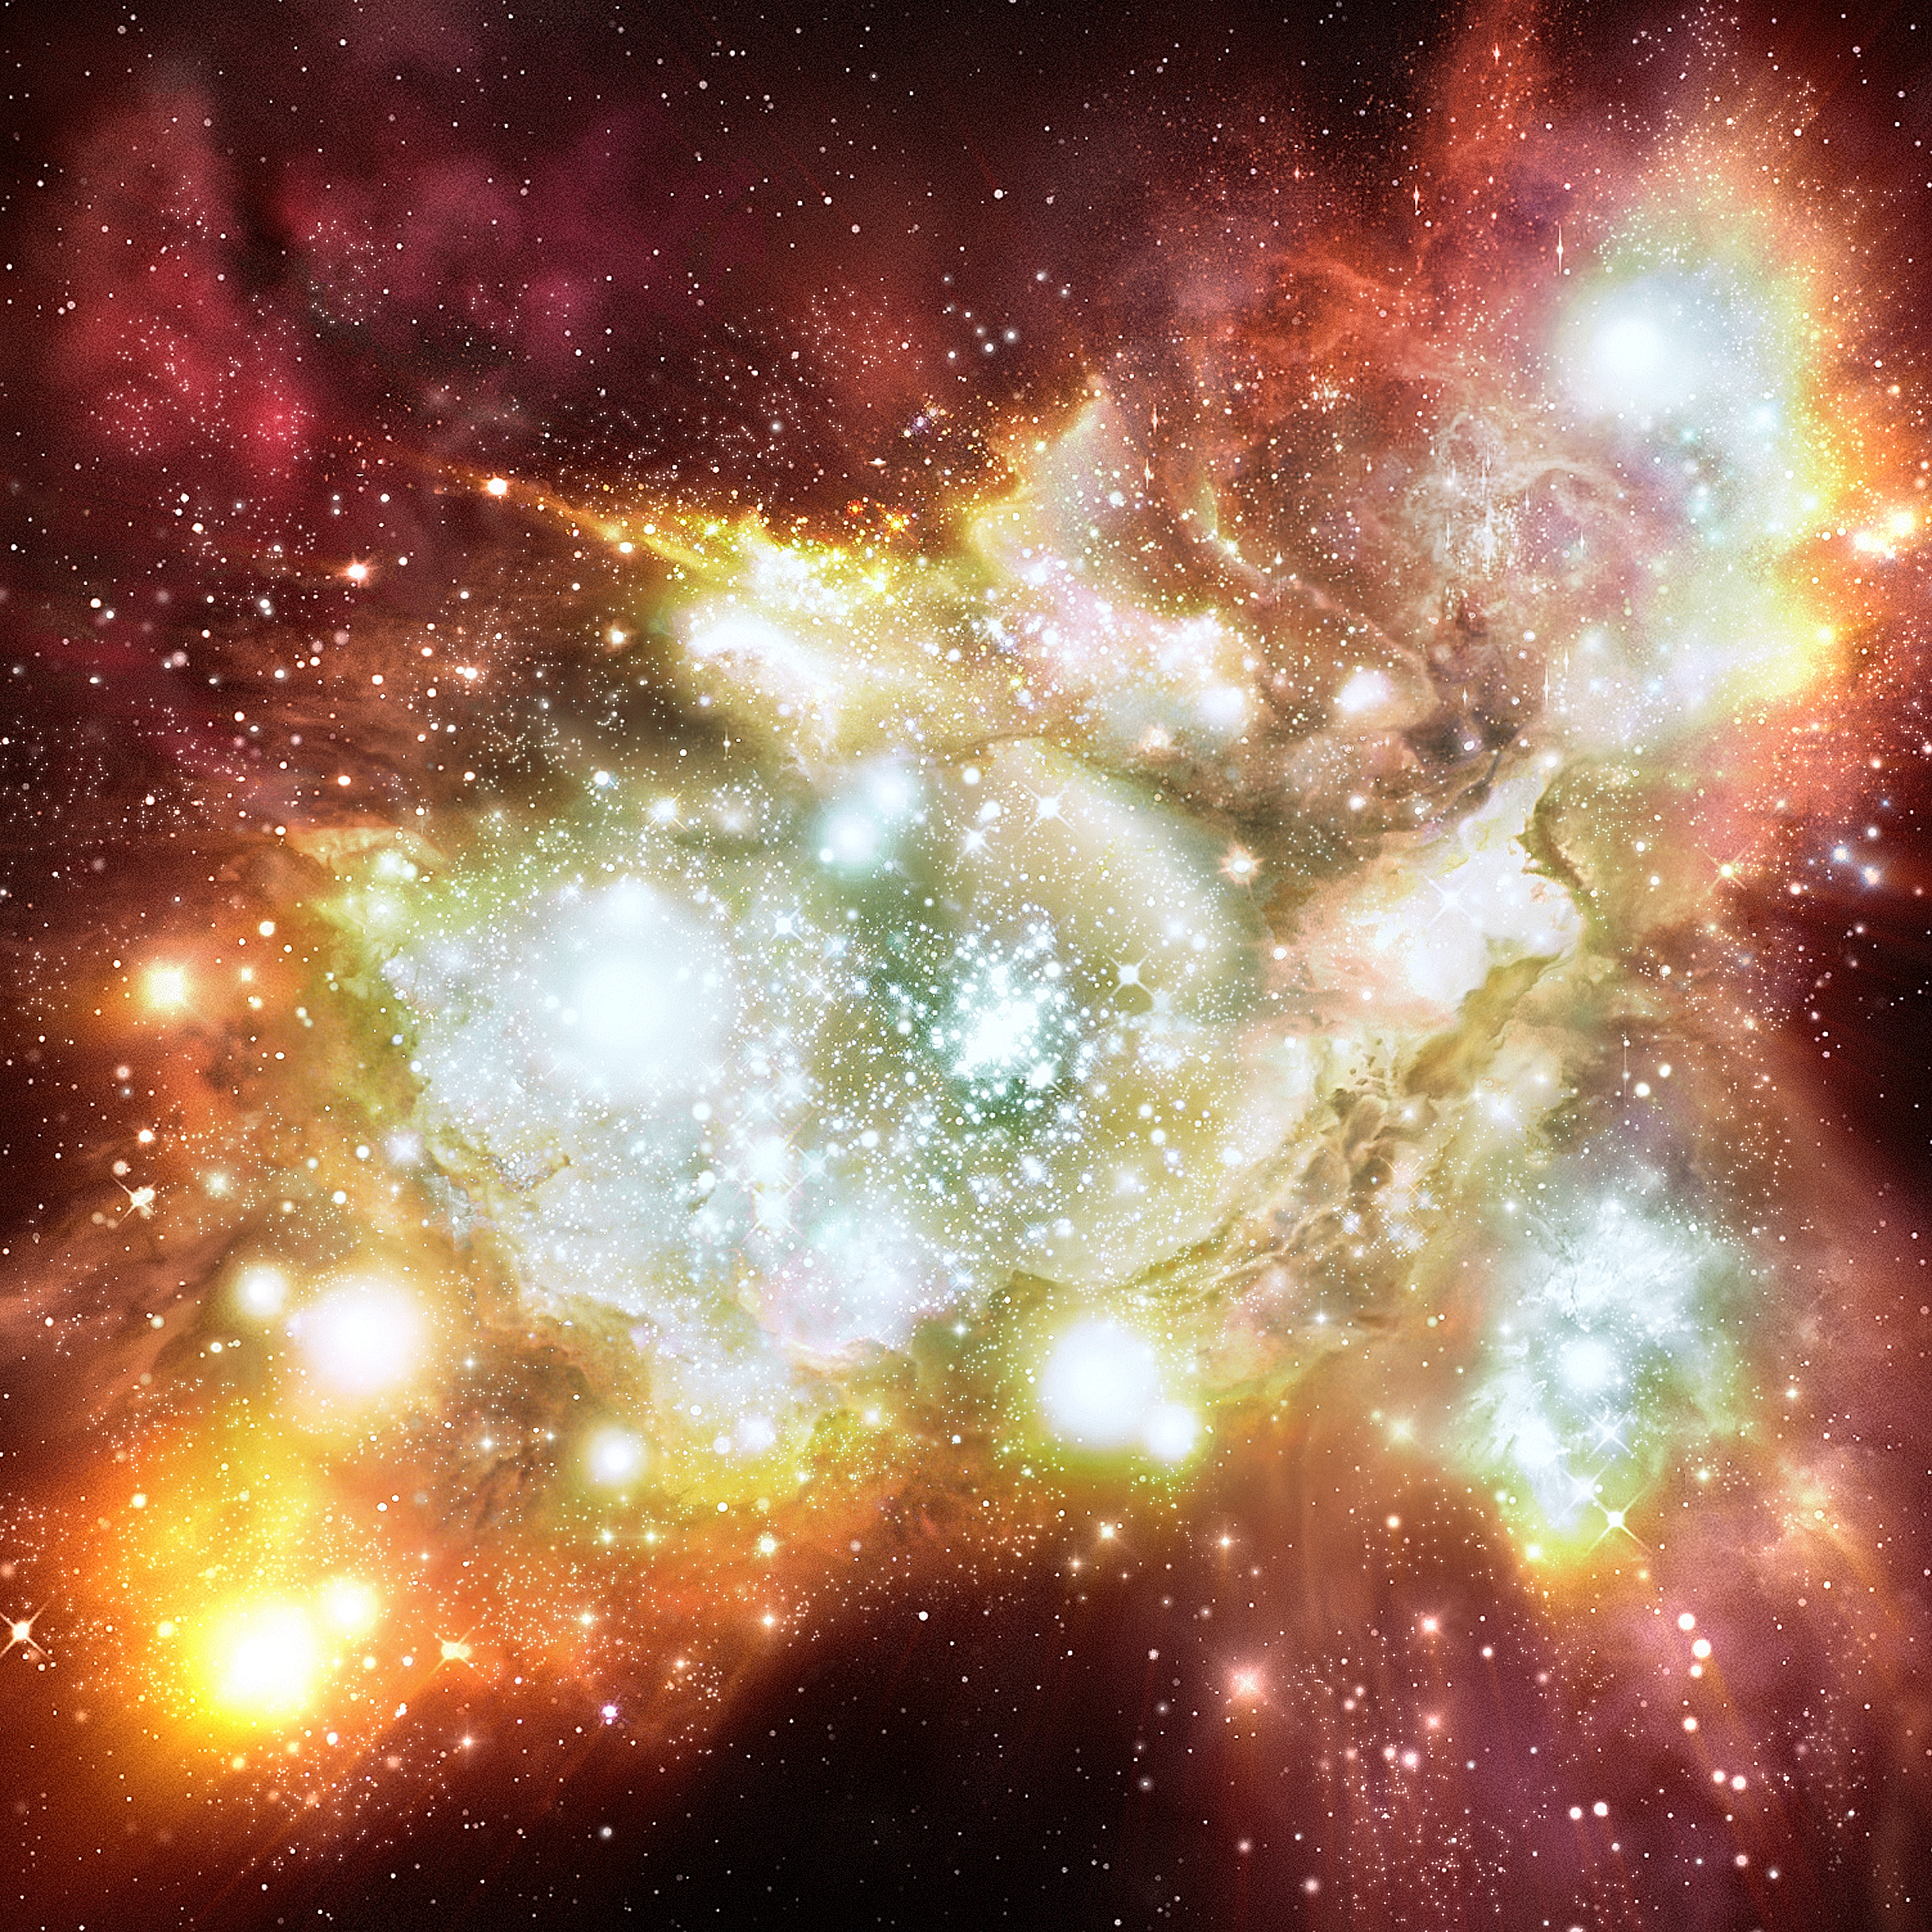

Mega starbirth cluster is biggest, brightest and hottest ever seen (artist's impression)

This illustration shows an artist's impression of the so-called Lynx arc, a newly identified distant super-cluster that contains a million blue-white stars twice as hot as similar stars in our Milky Way galaxy. The Lynx arc is one million times brighter than the well-known Orion Nebula, a nearby prototypical 'starbirth' region visible with small telescopes. The stars in the Lynx arc are more than twice as hot as the Orion Nebula's central stars, with surface temperatures up to 80 000›C. Though there are much bigger and brighter star-forming regions than the Orion Nebula in our local Universe, none are as bright as the Lynx arc, nor do they contain such large numbers of hot stars. The stars are so hot that a very large fraction of their light is emitted in the ultraviolet that makes the gas glow with the green and red colours illustrated here.

Credit: European Space Agency, NASA and Robert A.E. Fosbury (European Space Agency/Space Telescope-European Coordinating Facility, Germany)